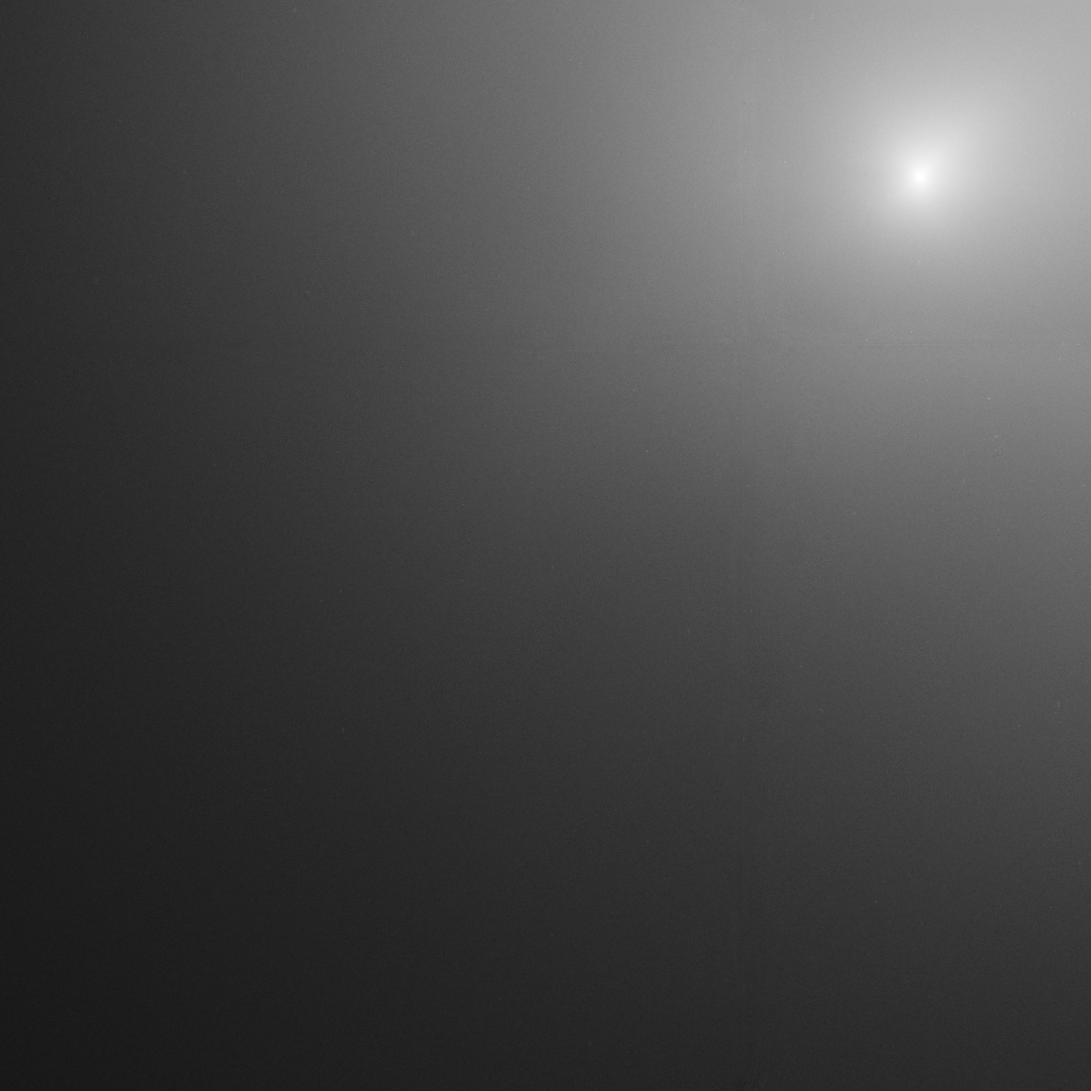

Comet 17P/Holmes Hubble image 2

This image taken by the NASA/ESA Hubble Space Telescope reveals Comet Holmes's bright core. It shows the coma, the cloud of dust and gas encircling the comet. The image was taken 31 Oct.

Credit: NASA,ESA, and H. Weaver (The Johns Hopkins University Applied Physics Laboratory)